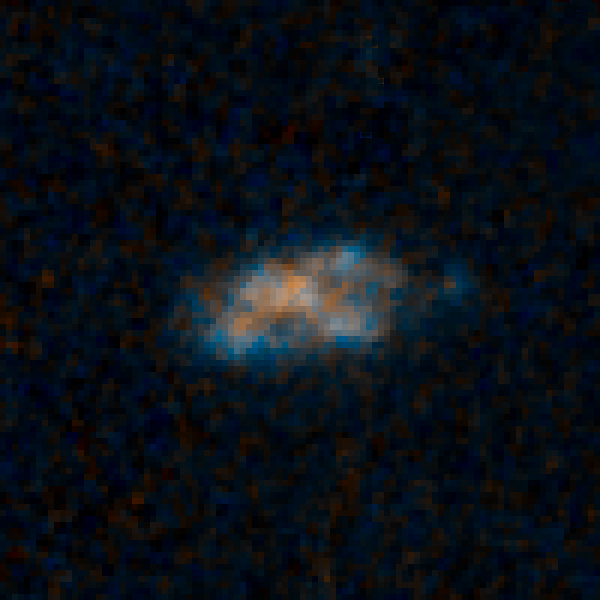

Sample galaxy 33160

This galaxy has so much dust surrounding it that the brilliant light from its quasar cannot be seen in these Hubble Space Telescope images.

Quasars are the brilliant beacons of light that are powered by black holes feasting on captured material, and in the process, heating some of the matter to millions of degrees.

This galaxy is part of a census of 30 quasar host galaxies conducted with two of NASA's premier observatories, the Hubble Space Telescope and Spitzer Space Telescope. It was found in the Cosmic Assembly Near-infrared Deep Extragalactic Legacy Survey (CANDELS). The study shows that 26 of the host galaxies bear no tell-tale signs of collisions with neighbors, such as distorted shapes.

Credit: NASA, ESA/Hubble, and K. Schawinski (Yale University, USA)